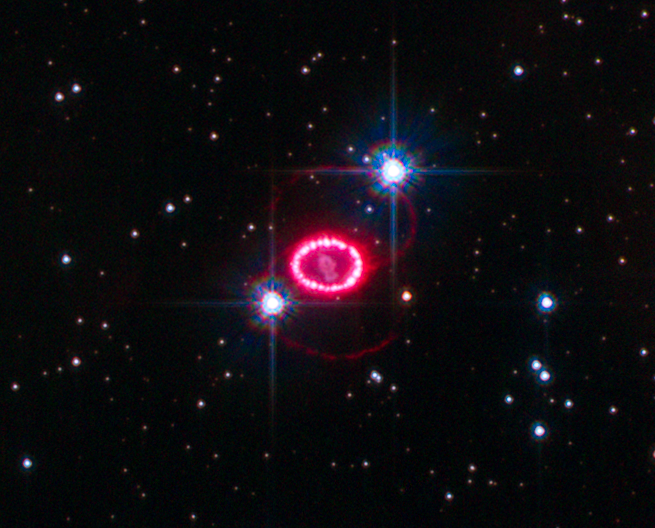

Shocked region around SN 1987A

This image shows the entire region around supernova 1987A. The most prominent feature in the image is a ring with dozens of bright spots. A shock wave of material unleashed by the stellar blast is slamming into regions along the ring's inner regions, heating them up, and causing them to glow. The ring, about a light-year across, was probably shed by the star about 20,000 years before it exploded.

Credit: NASA, ESA, K. France (University of Colordo, Boulder, USA), and P. Challis and R. Kirshner (Harvard-Smithsonian Center for Astrophysics, USA)